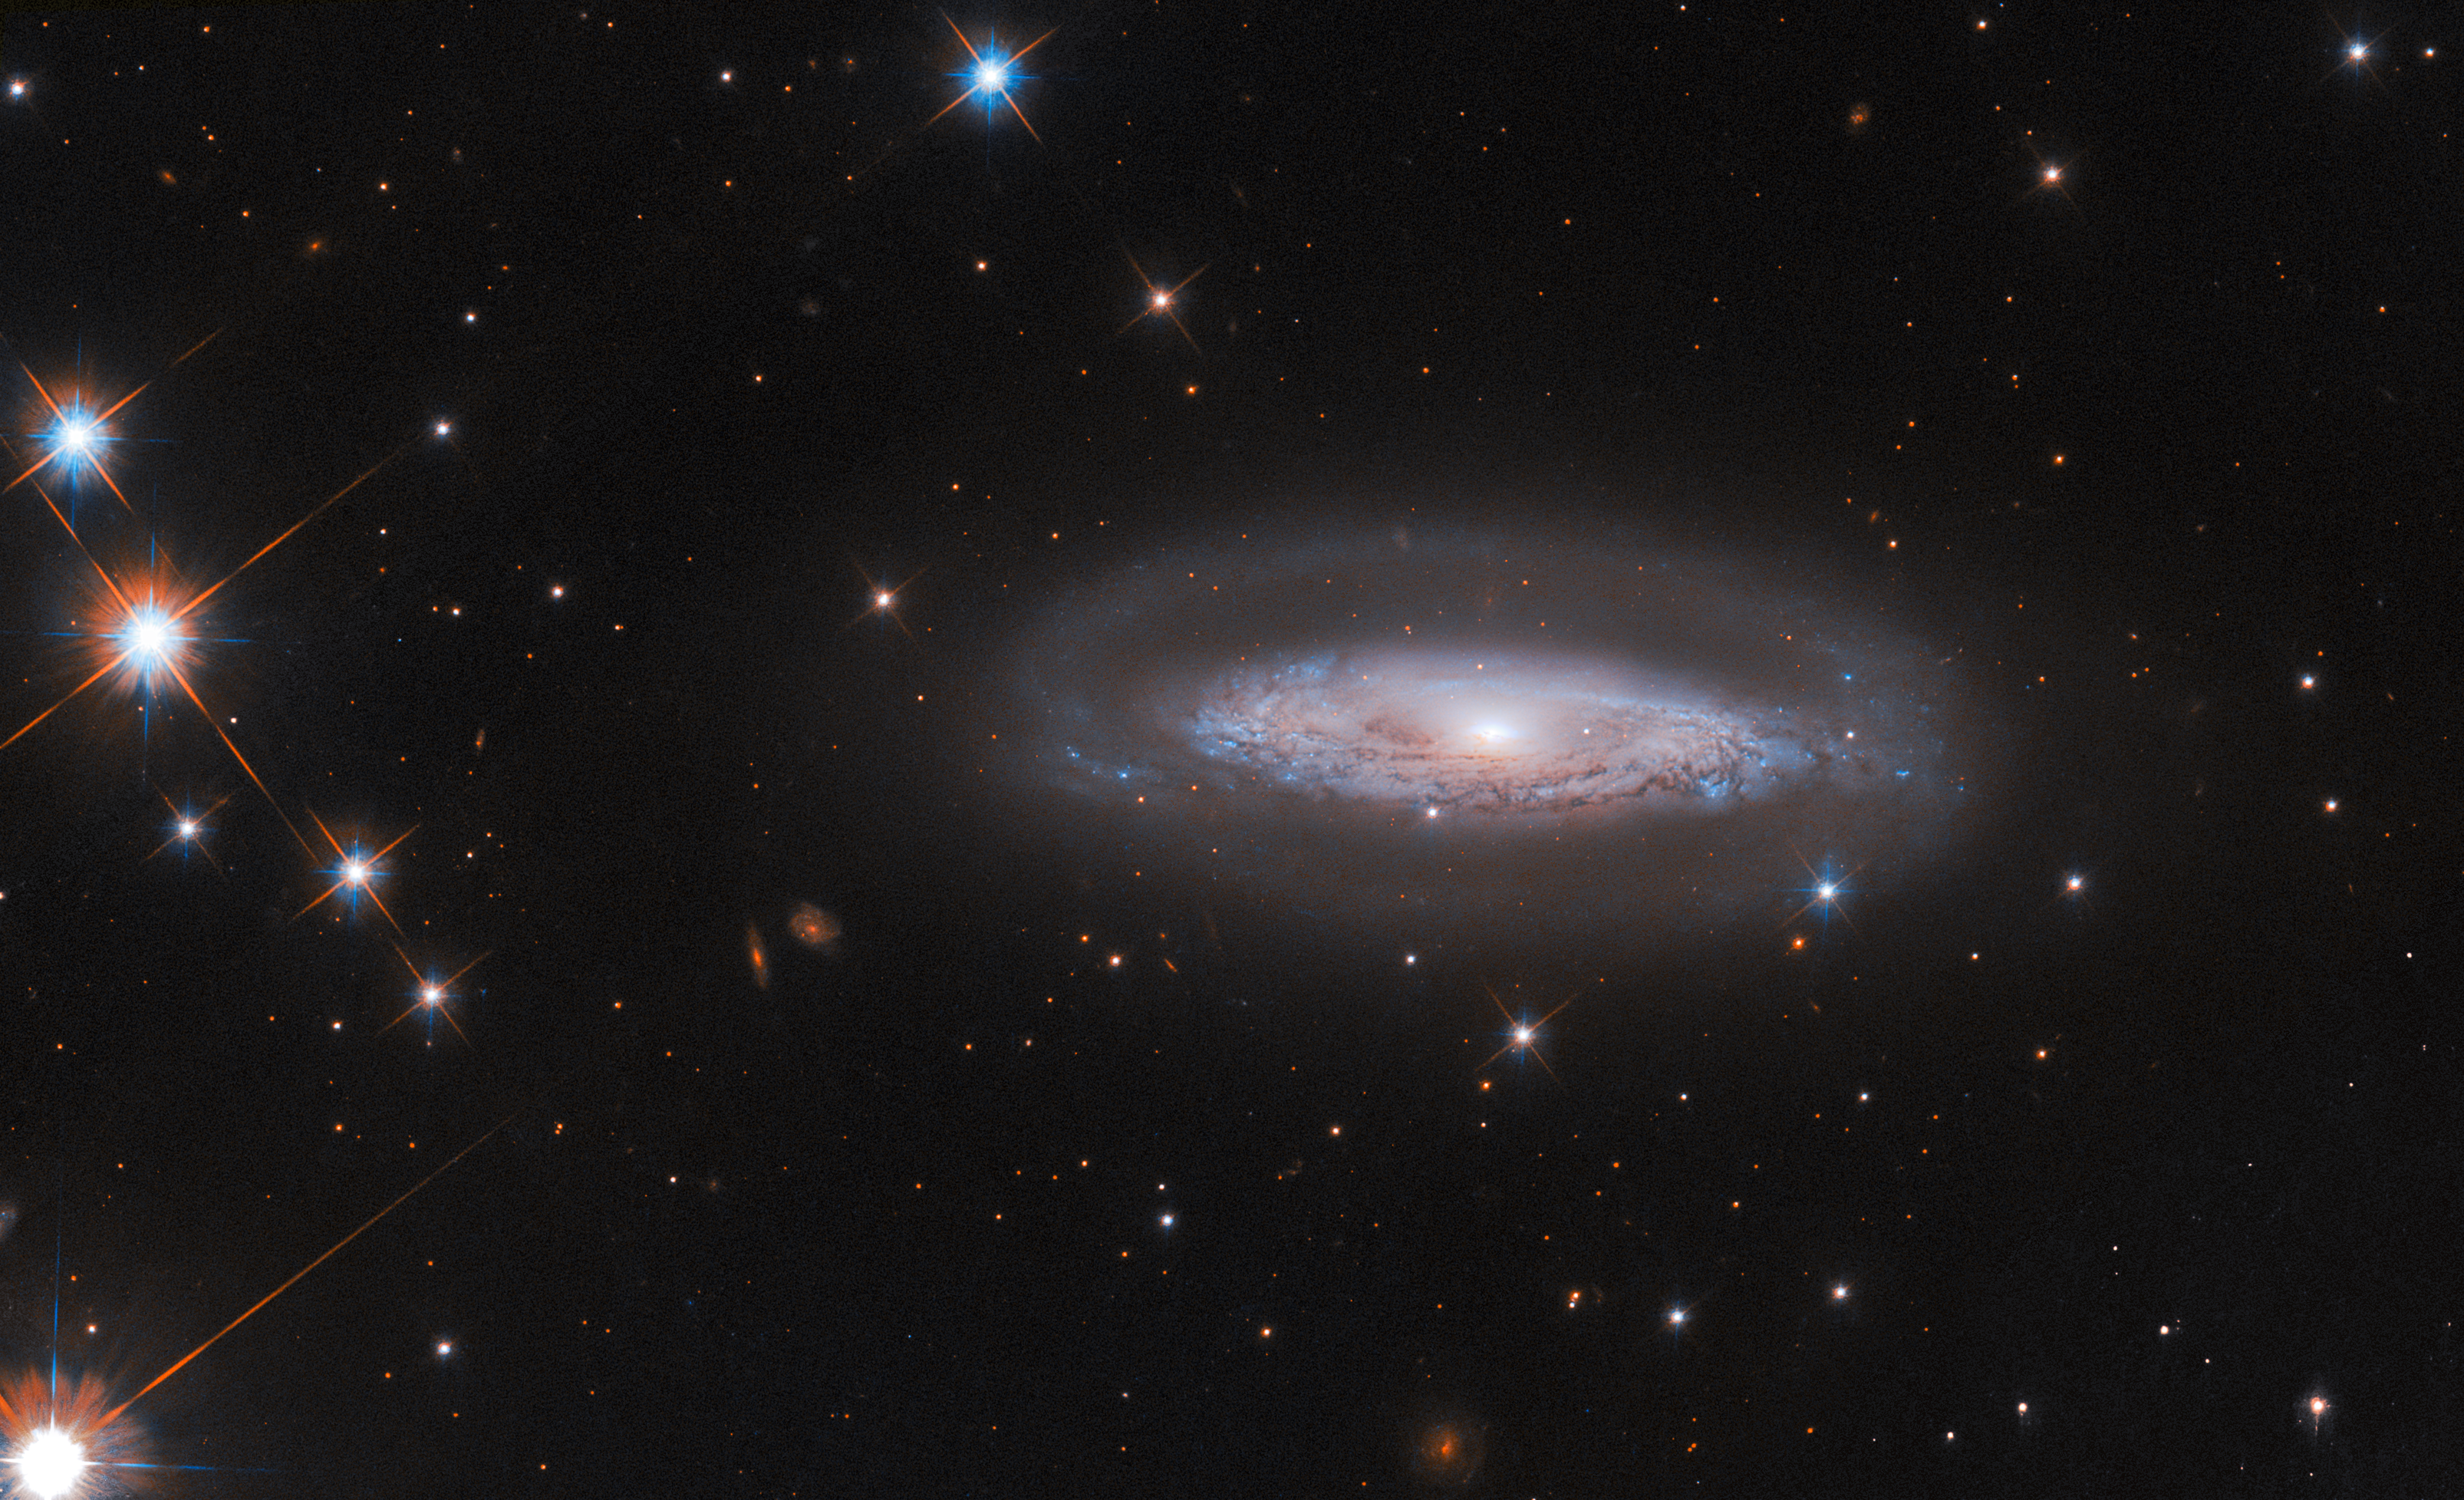

Power across the spectrum

The Hubble Space Telescope has a lot to show in this week’s Picture of the Week. Its view here is studded with stars, many of which appear particularly large and bright thanks to their nearby locations in our own galaxy, and which feature the characteristic diffraction patterns caused by Hubble’s optics. Much further away — around 240 million light-years distant in fact, in the southern constellation Telescopium — is the spiral galaxy IC 4709. Its swirling disc filled with stars and dust bands is beautifully captured, as is the faint halo surrounding it. The compact region at its core might be the most remarkable sight, however: this is an active galactic nucleus (AGN).

If IC 4709’s core were just filled with stars, it would not be nearly so bright. Instead it hosts a gargantuan black hole, 65 million times the mass of our Sun. A disc of gas spirals around and eventually into this black hole, with the gas crashing together and heating up as it spins. It reaches such high temperatures that it emits vast quantities of electromagnetic radiation, from infrared to visible to ultraviolet light and beyond — in this case including X-rays. The AGN in IC 4709 is obscured by a lane of dark dust, just visible at the centre of the galaxy in this image, which blocks any optical emission from the nucleus itself. Hubble’s spectacular resolution, however, gives astronomers a detailed view of the interaction between the quite small AGN and its host galaxy. This is essential to understanding supermassive black holes in galaxies much more distant than IC 4709, where resolving such fine details is not possible.

This image incorporates data from two Hubble surveys of nearby AGNs that were identified by the Swift X-ray/UV telescope, as does the image from last week. Swift will collect new data on these galaxies — with an X-ray telescope, it’s possible to directly see the X-rays from IC 4709’s AGN breaking through the obscuring dust. ESA’s Euclid telescope — currently surveying the dark Universe in optical and infrared light — will also image IC 4709 and other local AGNs. The complementary use of space telescopes across the electromagnetic spectrum is key to fully researching black holes and their impact on their host galaxies.

Credit: ESA/Hubble & NASA, M. Koss, A, Barth